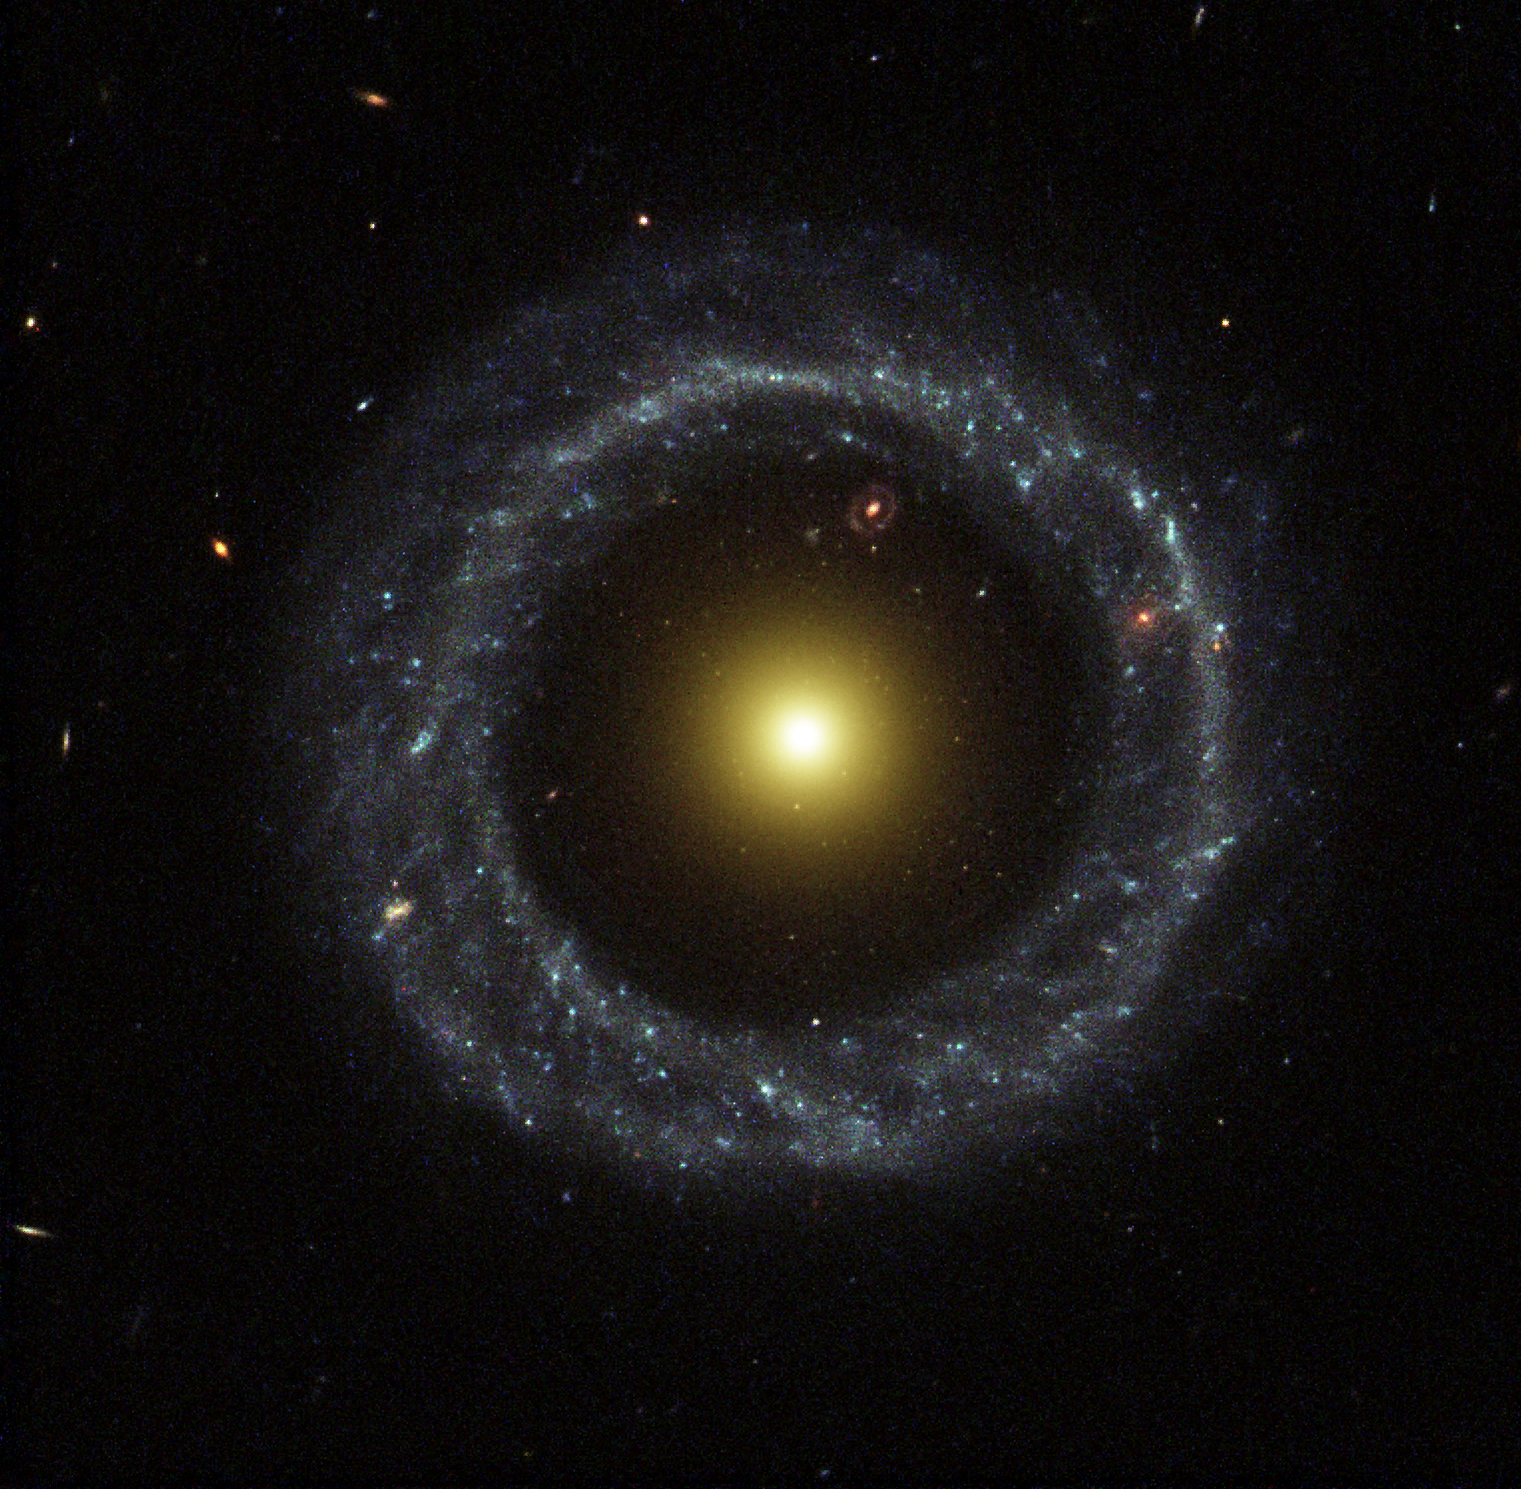

A Wheel within a Wheel

A nearly perfect ring of hot, blue stars pinwheels about the yellow nucleus of an unusual galaxy known as Hoag's Object. This image from the NASA/ESA Hubble Space Telescope captures a face-on view of the galaxy's ring of stars, revealing more detail than any existing photo of this object.

The entire galaxy is about 120, 000 light-years wide, which is slightly larger than our Milky Way Galaxy. The blue ring, which is dominated by clusters of young, massive stars, contrasts sharply with the yellow nucleus of mostly older stars. What appears to be a 'gap' separating the two stellar populations may actually contain some star clusters that are almost too faint to see. Curiously, an object that bears an uncanny resemblance to Hoag's Object can be seen in the gap at the one o'clock position. The object is probably a background ring galaxy.

Credit: NASA/ESA and The Hubble Heritage Team (STScI/AURA)